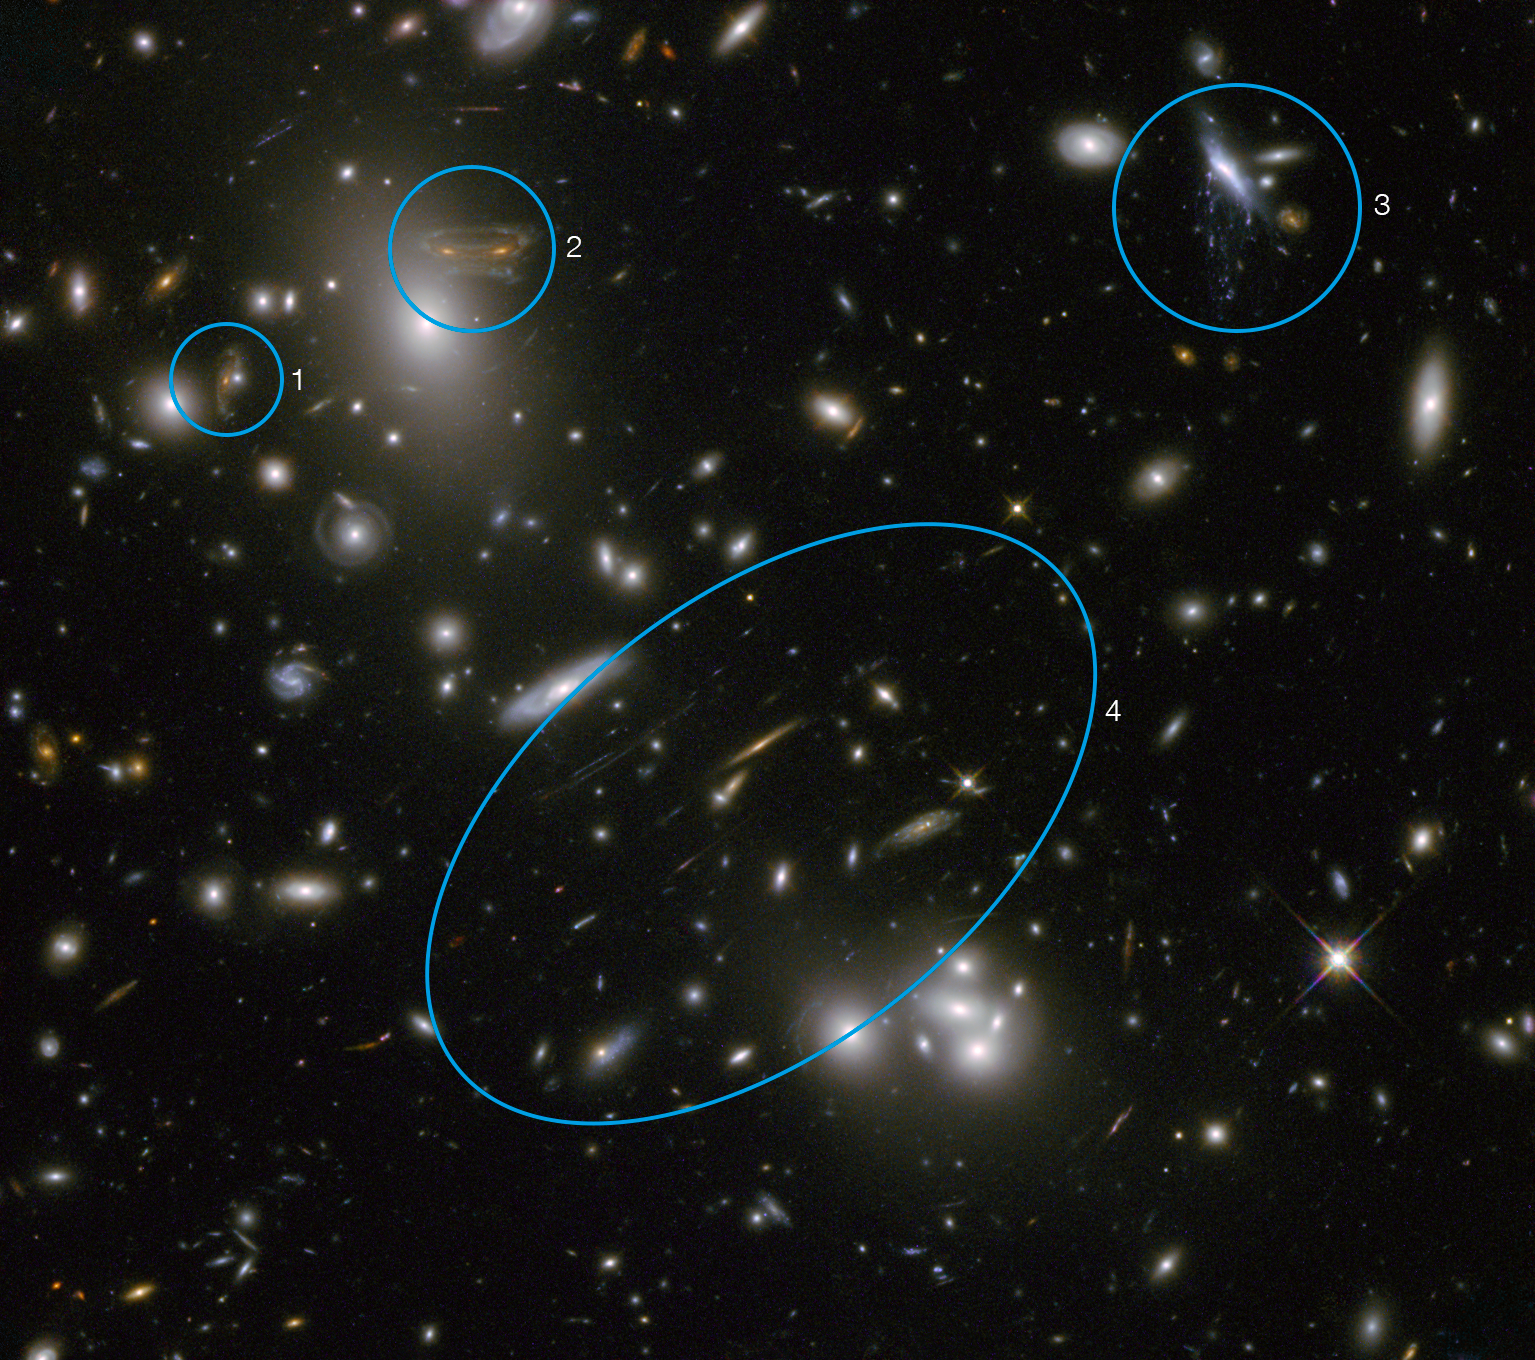

Annotated Hubble image of Abell 68

Abell 68, pictured here in infrared light, is a galaxy cluster. The effect of its gravity on light means it boosts Hubble’s power, extending the telescope’s ability to observe distant and faint objects. The fuzzy collection of blobs in the middle and upper left of the image is a swarm of galaxies, each with hundreds of billions of stars and vast amounts of dark matter. Distorted shapes visible throughout the field of view are distant galaxies whose light has been bent and amplified by the cluster.

Annotations:

1 and 2: This galaxy is visible twice, thanks to its light following two separate paths around an elliptical galaxy before reaching us. The image marked 2 is heavily distorted into the shape of an alien from the cult 1970s video game Space Invaders. The lensed galaxy lies at a redshift of around 1.6. The lensing galaxy significantly closer, at a redshift of around 0.26.

3: This galaxy appears to be melting, with purple liquid dripping from it. In fact, the purple droplets are clouds of gas being stripped out of the galaxy and heated up. This phenomenon, called ram pressure stripping, occurs when a galaxy passes through a denser patch of intergalactic gas, which strips out the gas from within the galaxy.

4: The series of long, light streaks here are background galaxies, the images of which have been heavily distorted by the lensing effects of the cluster in the foreground. These lie at a range of redshifts between around 2 and 6.

Credit: NASA & ESA. Acknowledgement: N. Rose